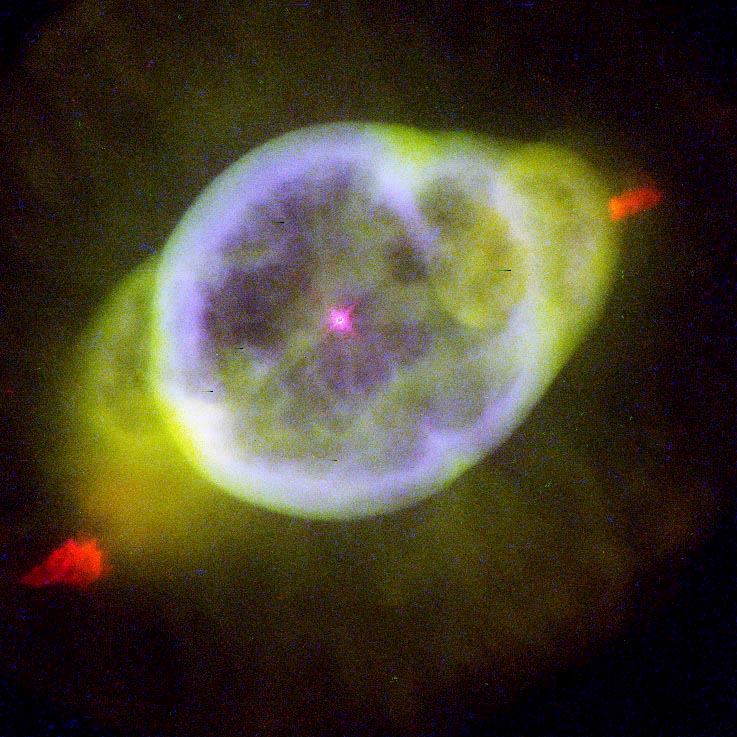

NGC 3242

This image is a part of the Hubble Gallery of Planetary Nebulae.

Credit: Bruce Balick and Jason Alexander (University of Washington), Arsen Hajian (U.S. Naval Observatory), Yervant Terzian (Cornell University ), , Mario Perinotto (University of Florence), Patrizio Patriarchi (Arcetri Observatory) and NASA/ESA